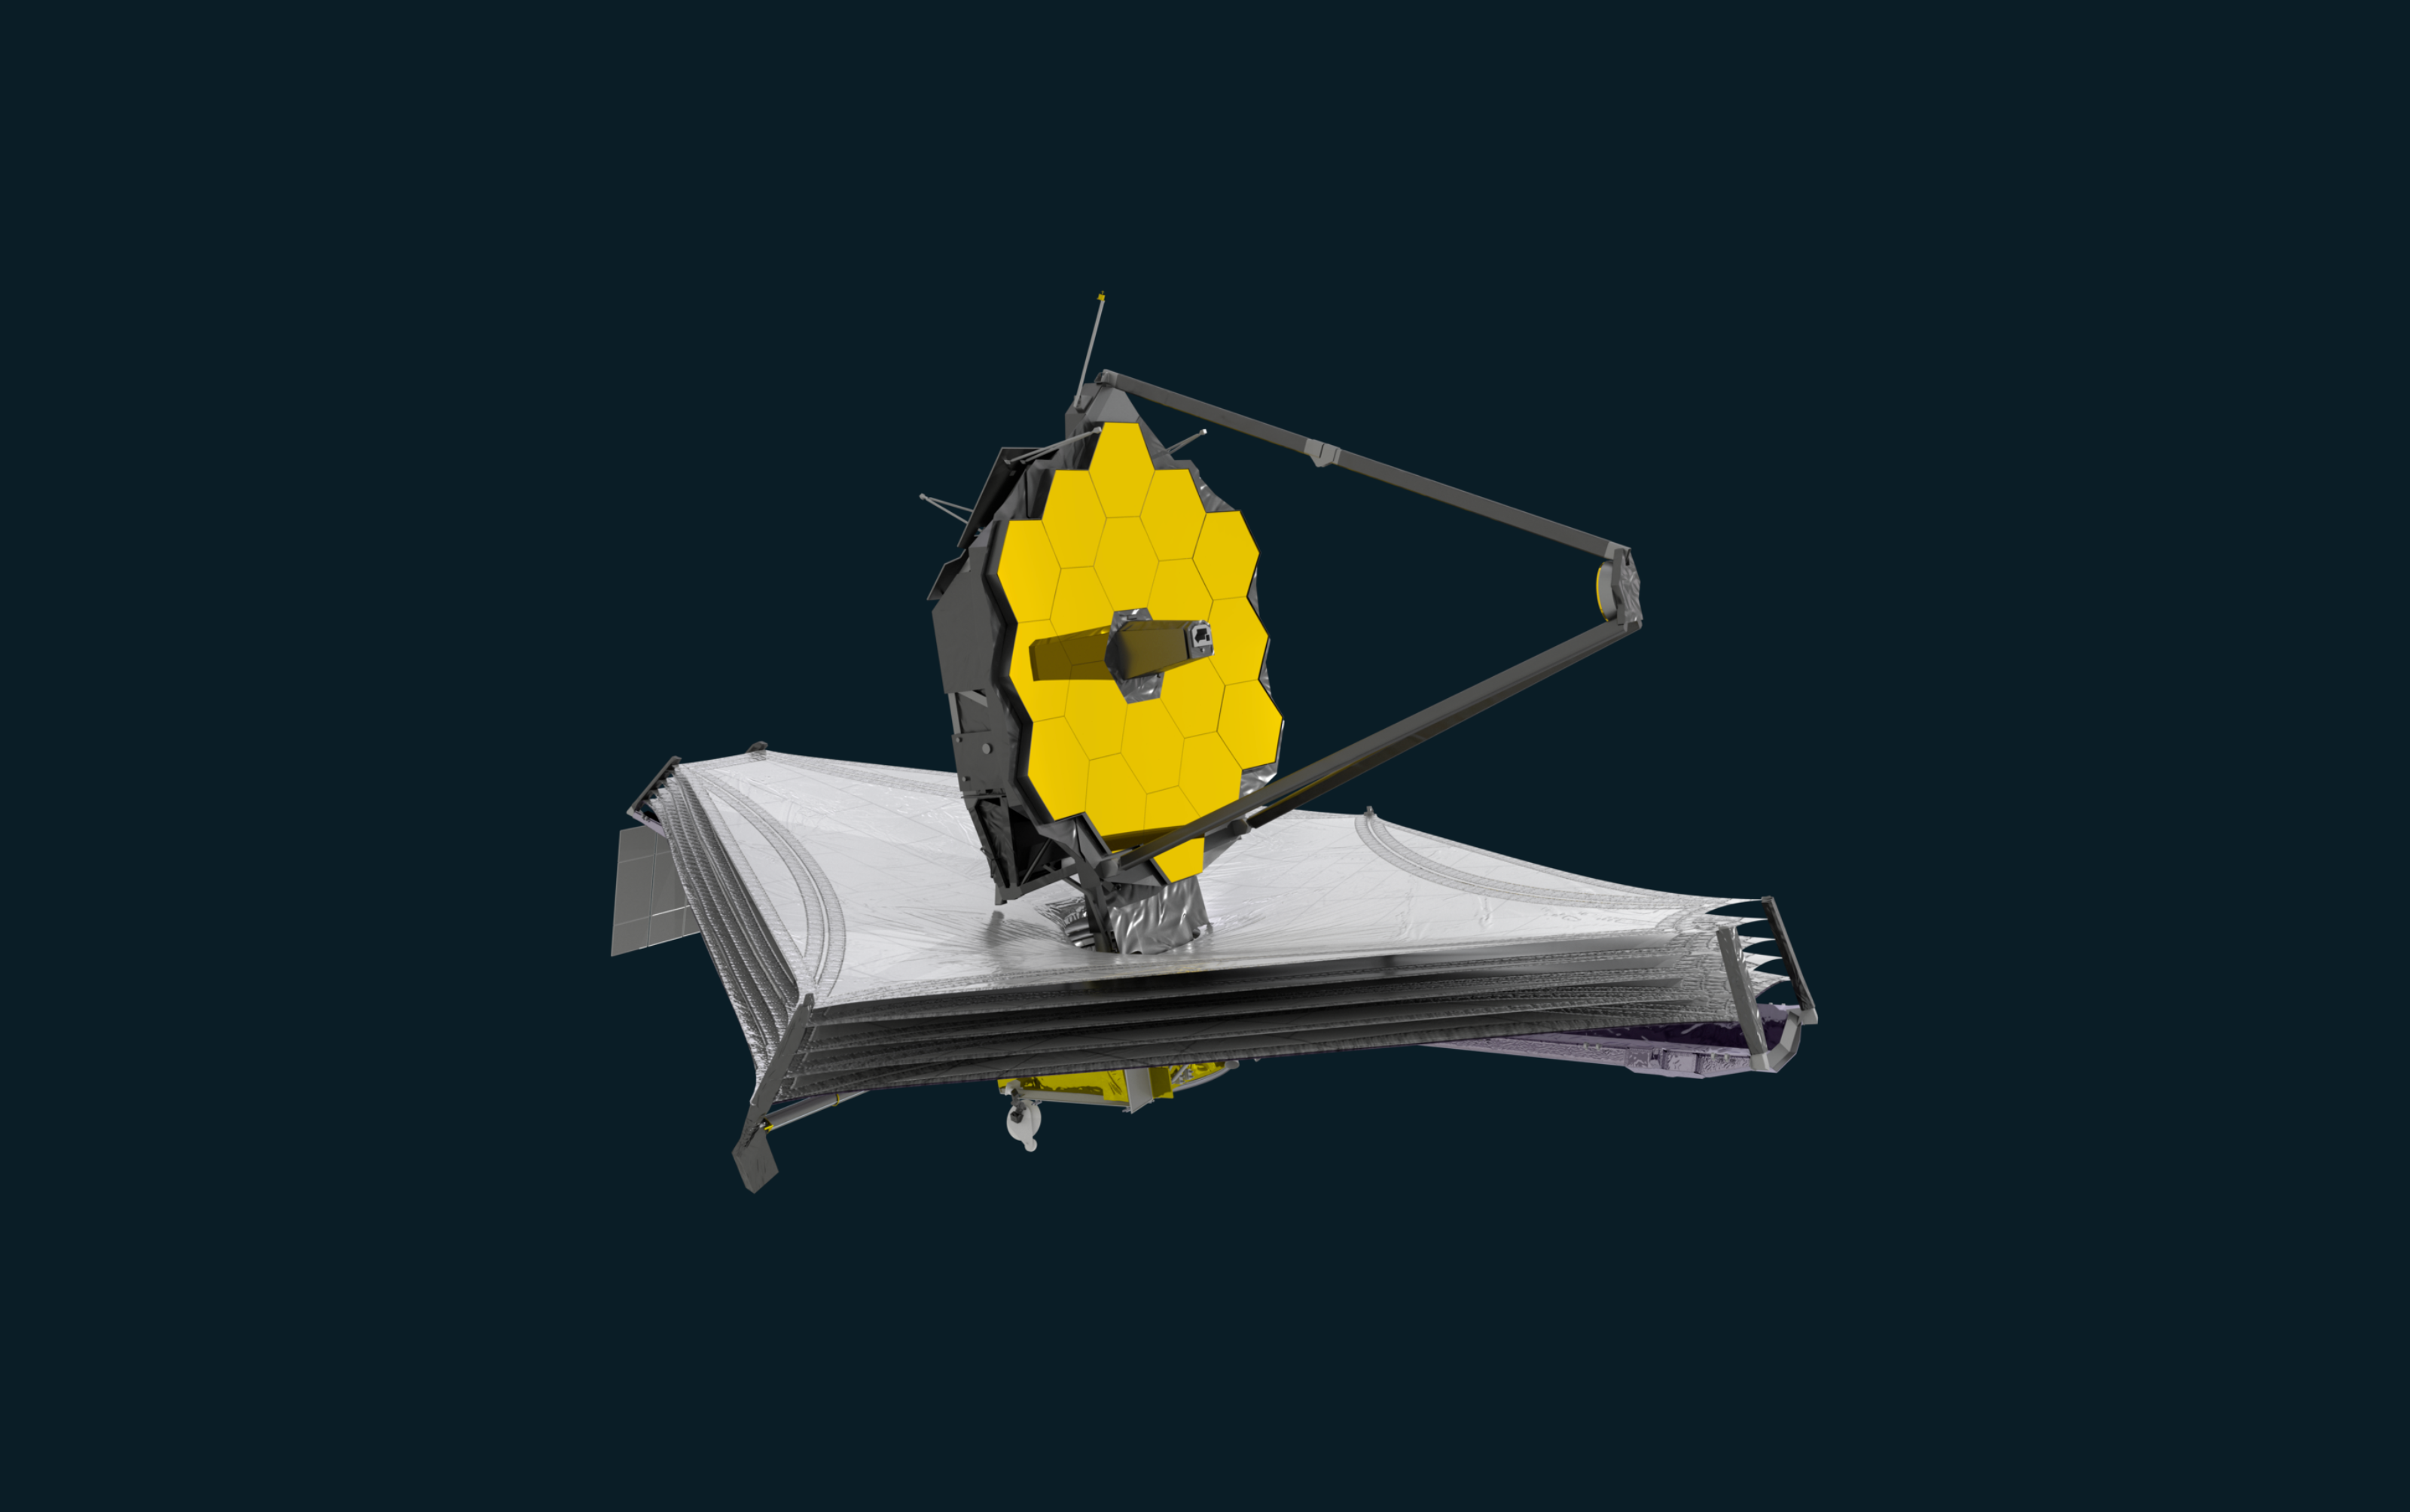

Webb spacecraft artist's impression

Artist’s Impression of the NASA/ESA/CSA James Webb Space Telescope.

Credit: ESA/ATG medialab